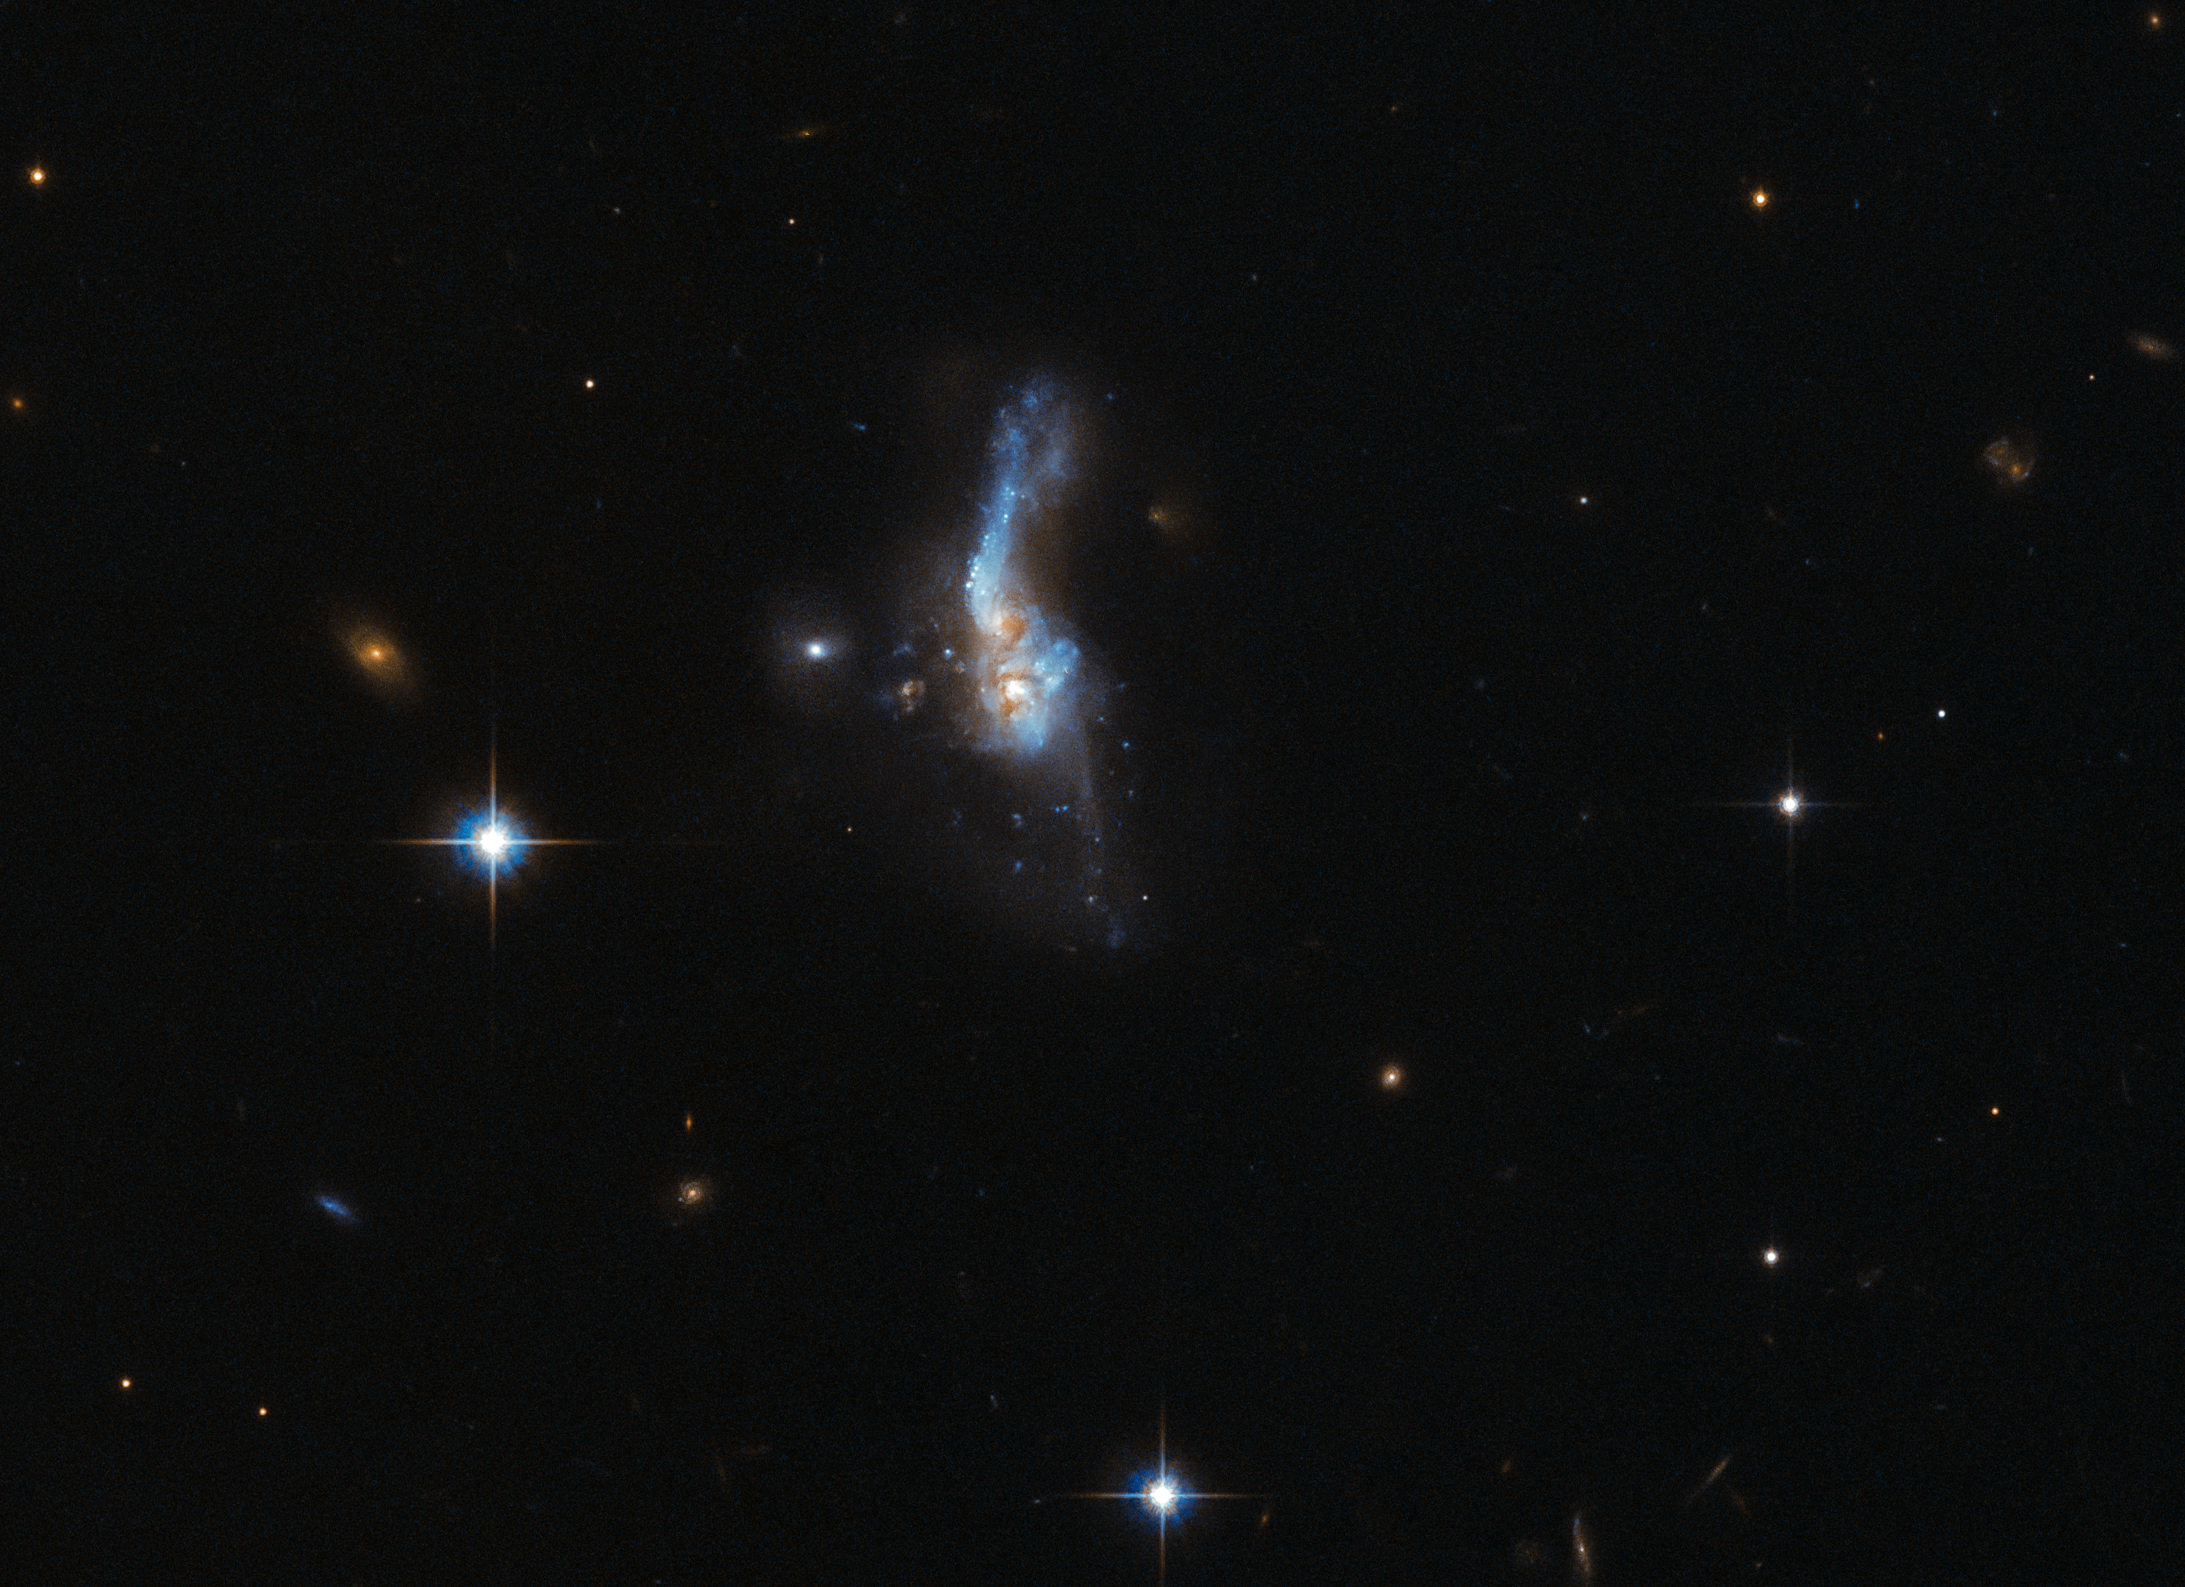

When galaxies collide

This delicate smudge in deep space is far more turbulent than it first appears. Known as IRAS 14348-1447 — a name derived in part from that of its discoverer, the Infrared Astronomical Satellite (IRAS for short) — this celestial object is actually a combination of two gas-rich spiral galaxies. This doomed duo approached one another too closely in the past, gravity causing them to affect and tug at each other and slowly, destructively, merge into one. The image was taken by Hubble’s Advanced Camera for Surveys (ACS).

IRAS 14348-1447 is located over a billion light-years away from us. It is one of the most gas-rich examples known of an ultraluminous infrared galaxy, a class of cosmic objects that shine characteristically — and incredibly — brightly in the infrared part of the spectrum. Almost 95% of the energy emitted by IRAS 14348-1447 is in the far-infrared!

The huge amount of molecular gas within IRAS 14348-1447 fuels its emission, and undergoes a number of dynamical processes as it interacts and moves around; these very same mechanisms are responsible for IRAS 14348-1447’s own whirling and ethereal appearance, creating prominent tails and wisps extending away from the main body of the galaxy.

Credit: ESA/Hubble & NASA